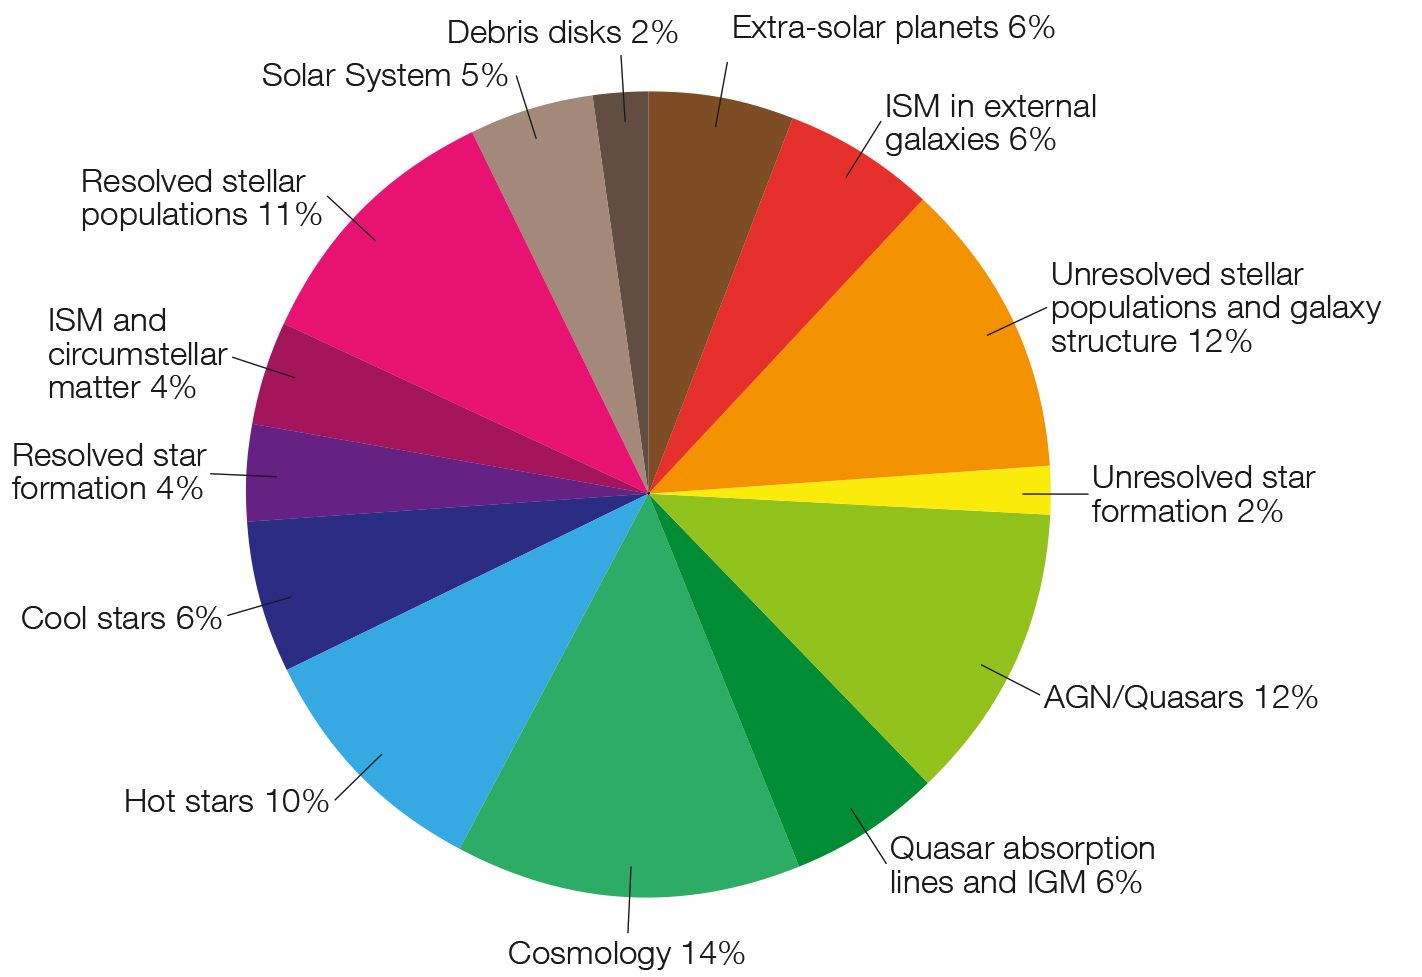

Distribution of scientific topics

This figure shows the distribution of scientific topics among the proposals submitted for Cycle 22, which will be discussed and ranked at the time allocation committee in June 2014.

Credit: NASA and ESA